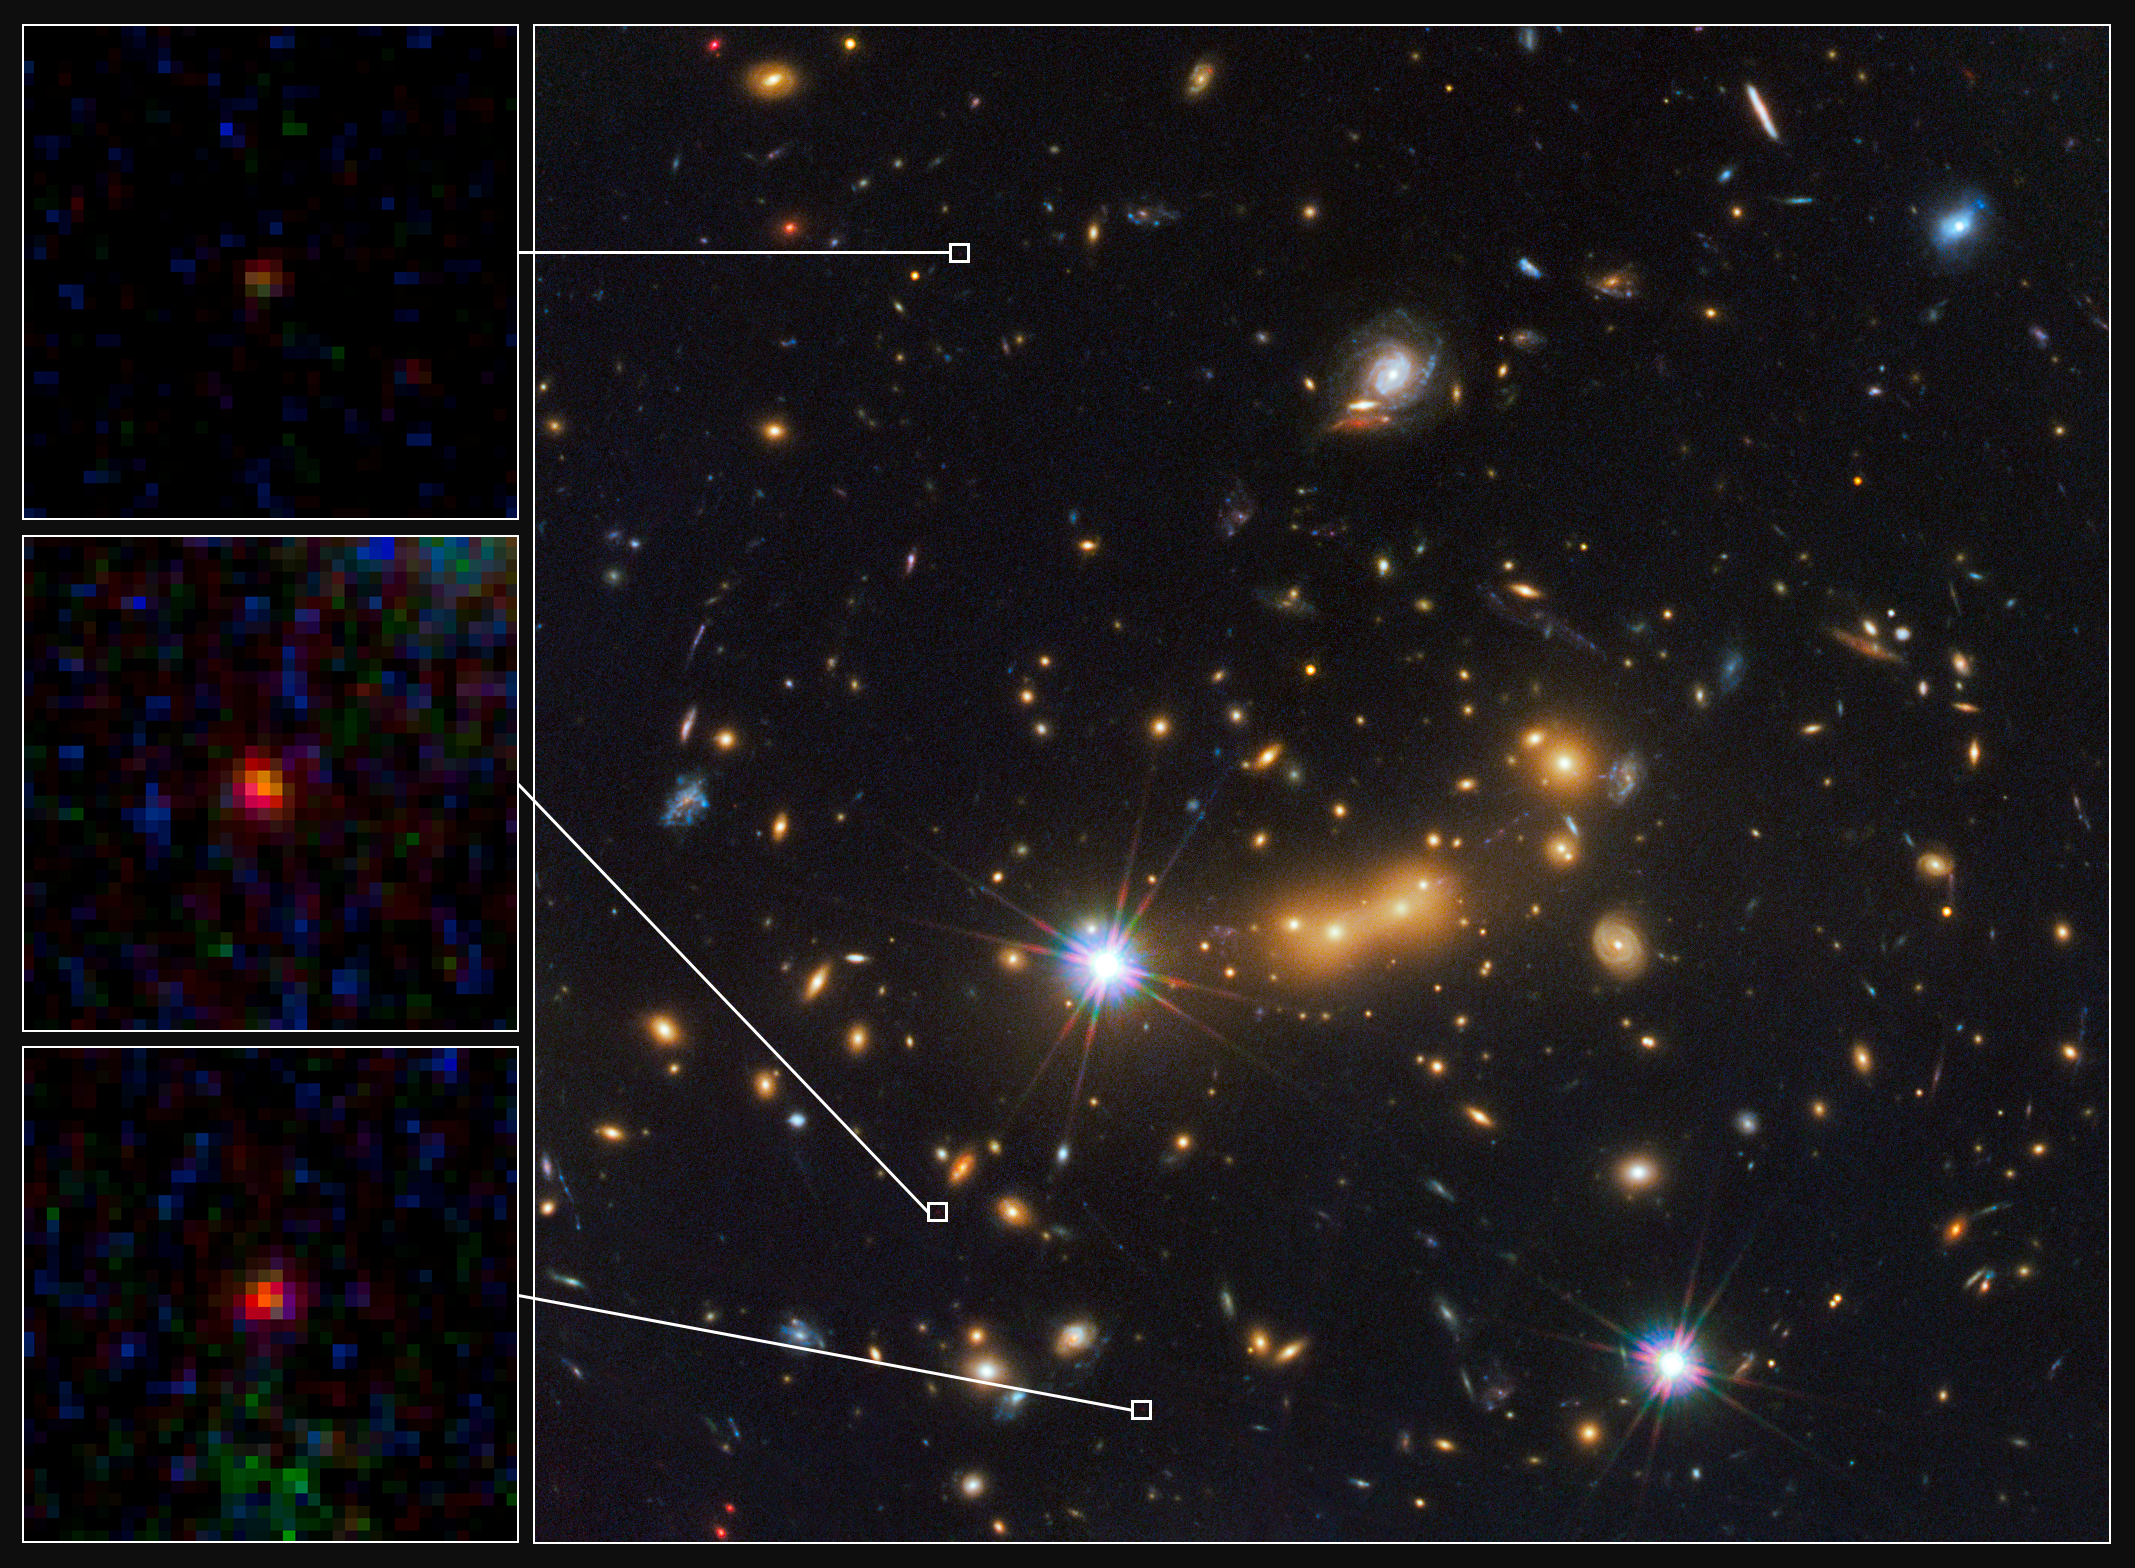

Hubble spots three magnified views of most distant known galaxy

In this image, astronomers use the NASA/ESA Hubble Space Telescope and a cosmic zoom lens to uncover the farthest known galaxy in the Universe.

The newly discovered galaxy, named MACS0647-JD, is very young and only a tiny fraction of the size of our Milky Way. The object is observed 420 million years after the Big Bang, when the Universe was 3 percent of its present age of 13.7 billion years.

Astronomers used the powerful gravity from the massive galaxy cluster MACS J0647+7014 to magnify the light from the distant galaxy, an effect called gravitational lensing. The bright yellow galaxies near the center of the image are cluster members.

Due to the gravitational lensing technique, astronomers observed three magnified images of MACS0647-JD with the Hubble telescope. The cluster’s gravity boosted the light from the faraway galaxy, making the images appear approximately eight, seven, and two times brighter than they otherwise would, enabling astronomers to detect them more efficiently and with greater confidence. Without the cluster’s magnification powers, astronomers would not have seen this remote galaxy. The three close-up images of the magnified galaxy appear in the inset at left.

This is the latest discovery from a large program, called the Cluster Lensing And Supernova survey with Hubble (CLASH), that uses natural zoom lenses to reveal distant galaxies in the early Universe.

This image is a composite taken with Hubble’s Wide Field Camera 3 and the Advanced Camera for Surveys. The observations were taken 5 October and 29 November 2011.

Credit: NASA, ESA, and M. Postman and D. Coe (Space Telescope Science Institute), and the CLASH team